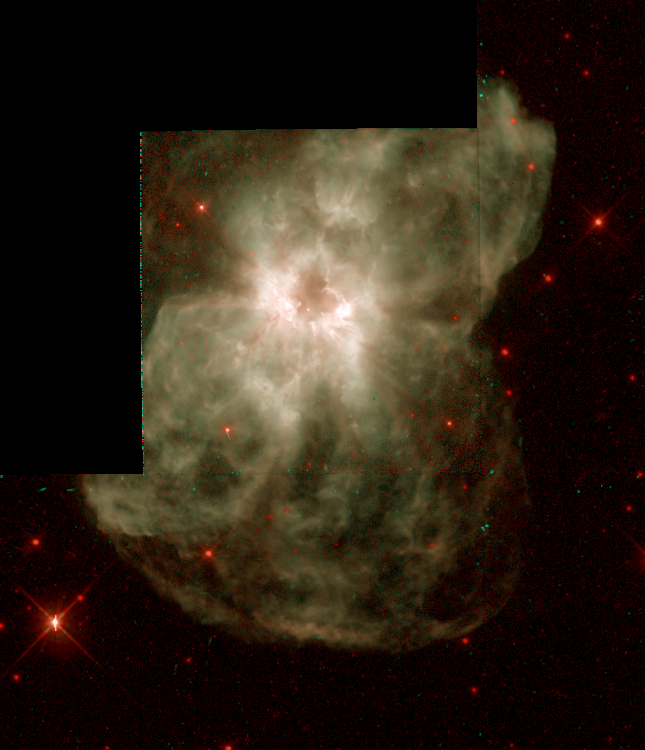

NGC 2440

This image is a part of the Hubble Gallery of Planetary Nebulae.

Credit: Howard Bond (ST ScI) and NASA/ESA